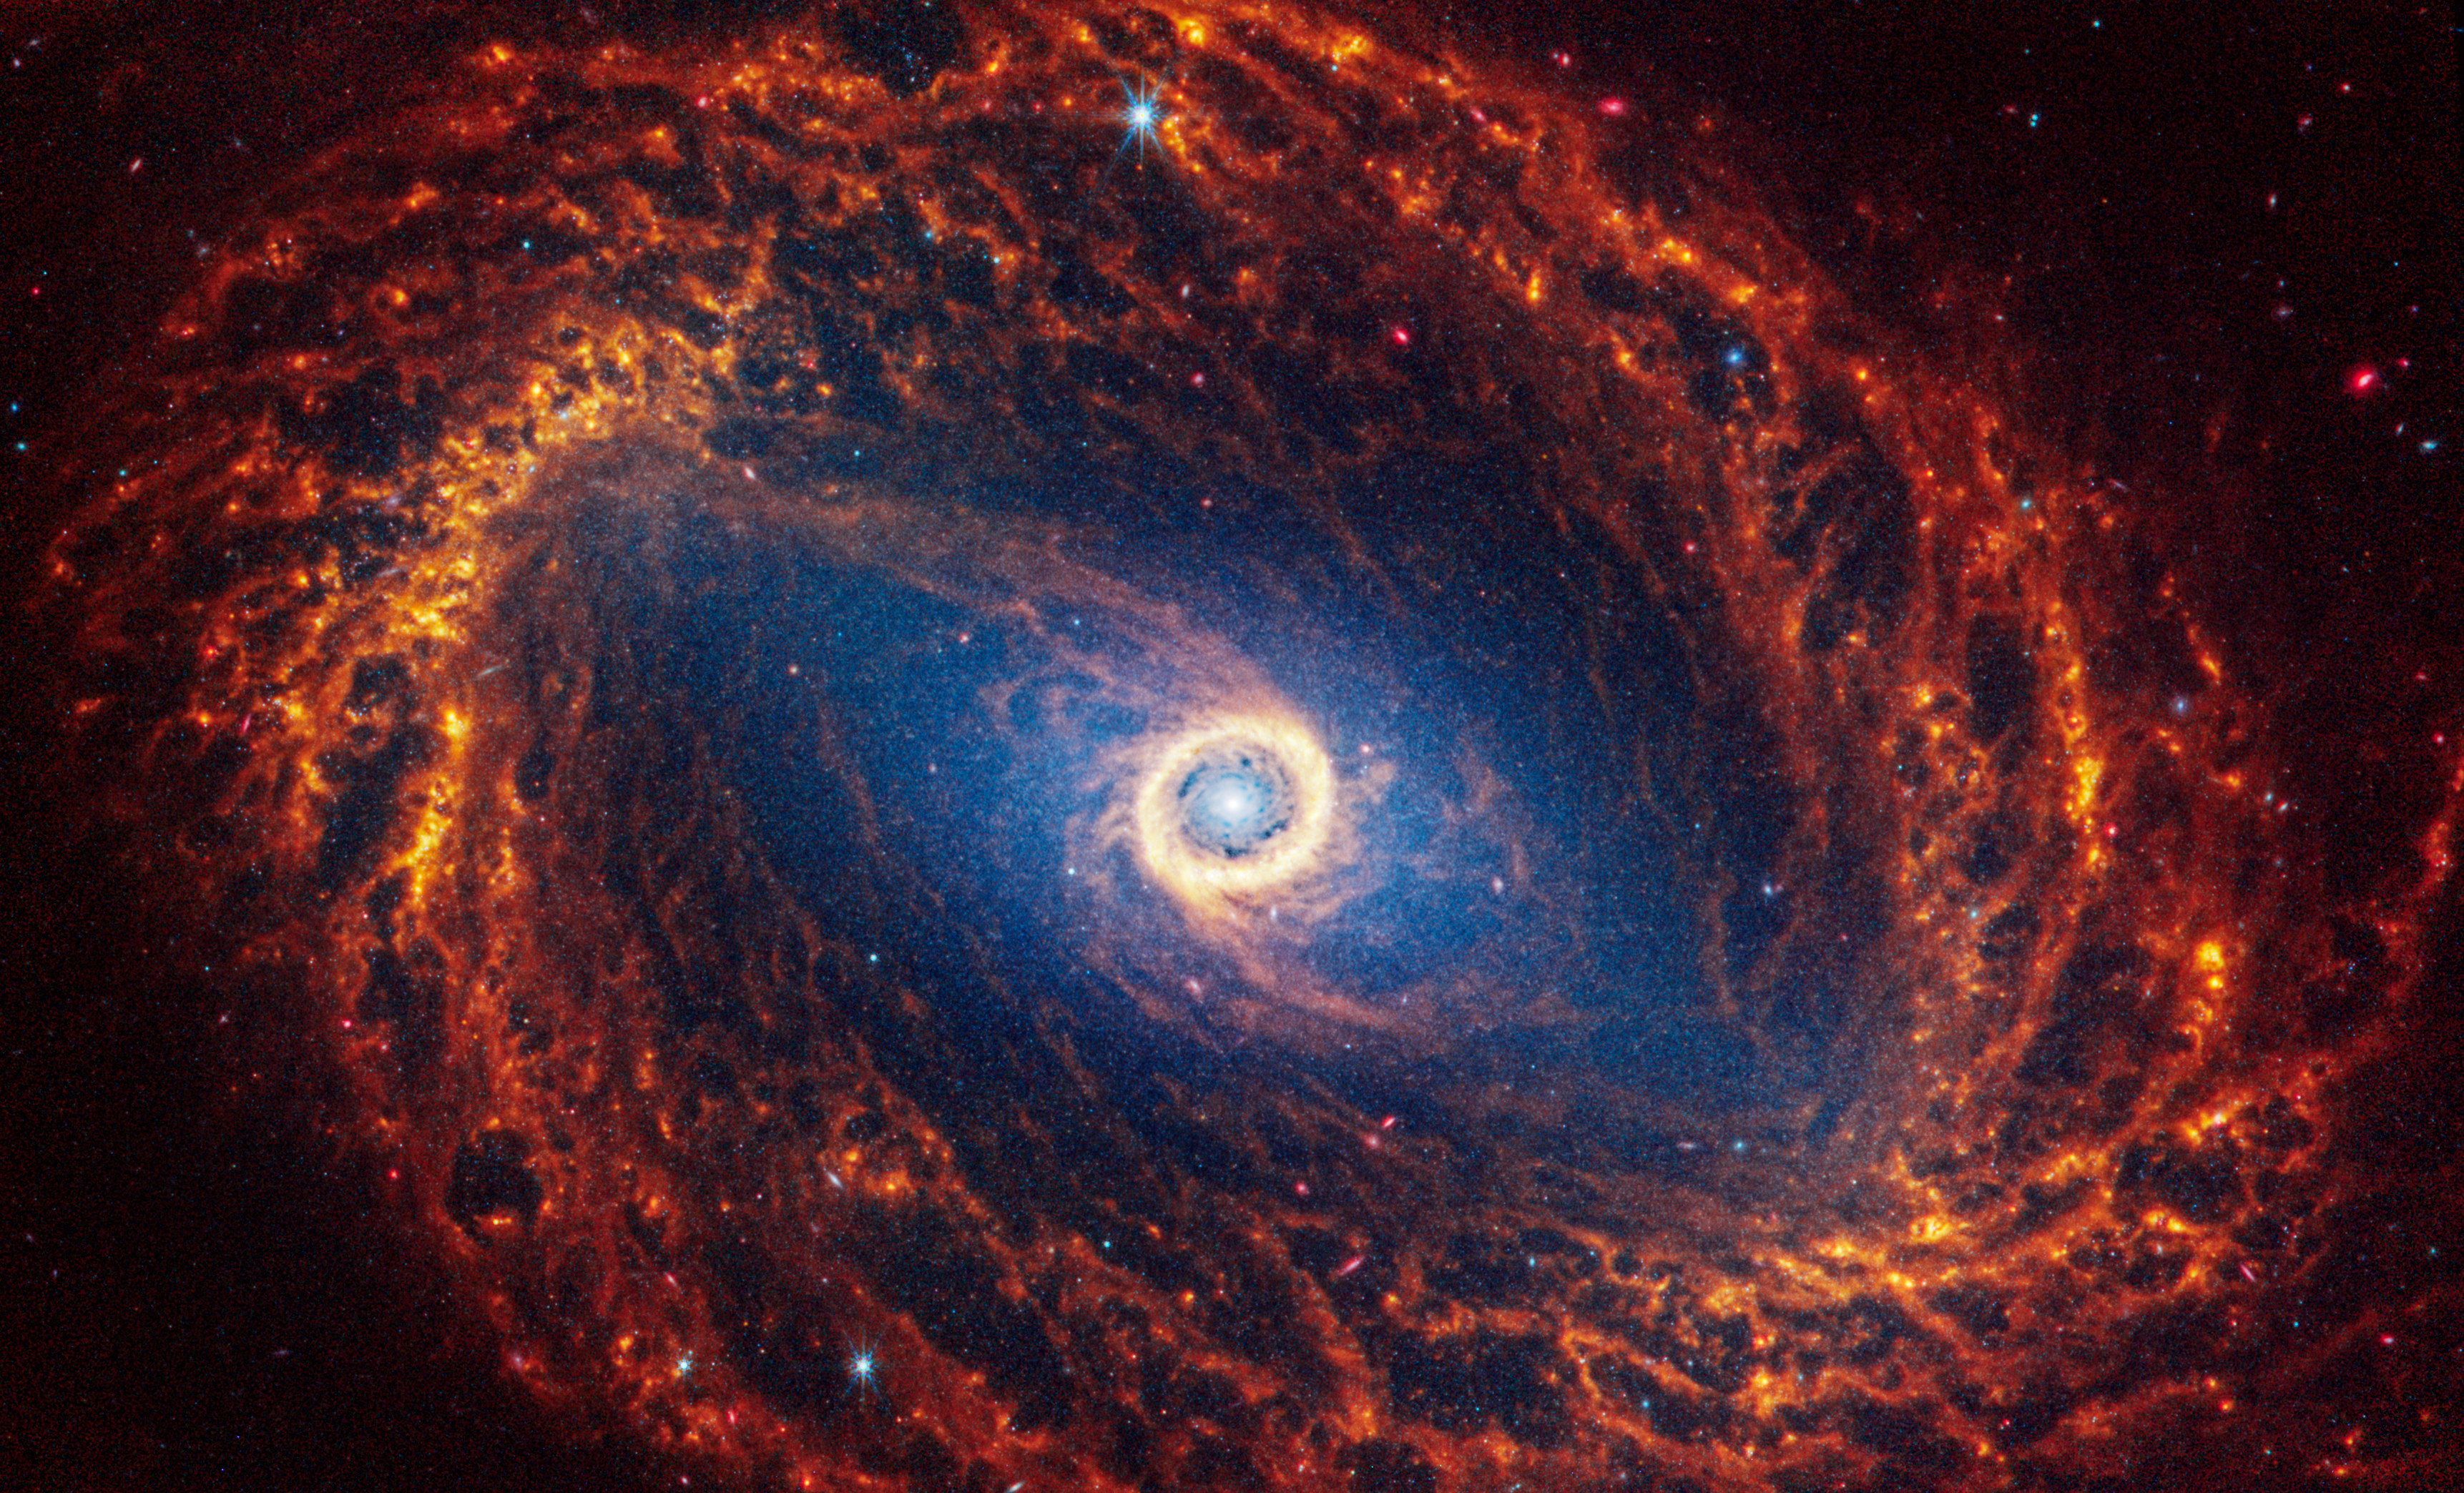

NGC 1512

This spiral galaxy was observed as part of the Physics at High Angular resolution in Nearby GalaxieS (PHANGS) program, a large project that includes observations from several space- and ground-based telescopes of many galaxies to help researchers study all phases of the star formation cycle, from the formation of stars within dusty gas clouds to the energy released in the process that creates the intricate structures revealed by Webb’s new images.

NGC 1512 is 30 million light-years away in the constellation Horologium.

Learn more about what can be seen in this vast collection of Webb images here.

Credit: NASA, ESA, CSA, STScI, J. Lee (STScI), T. Williams (Oxford), PHANGS Team